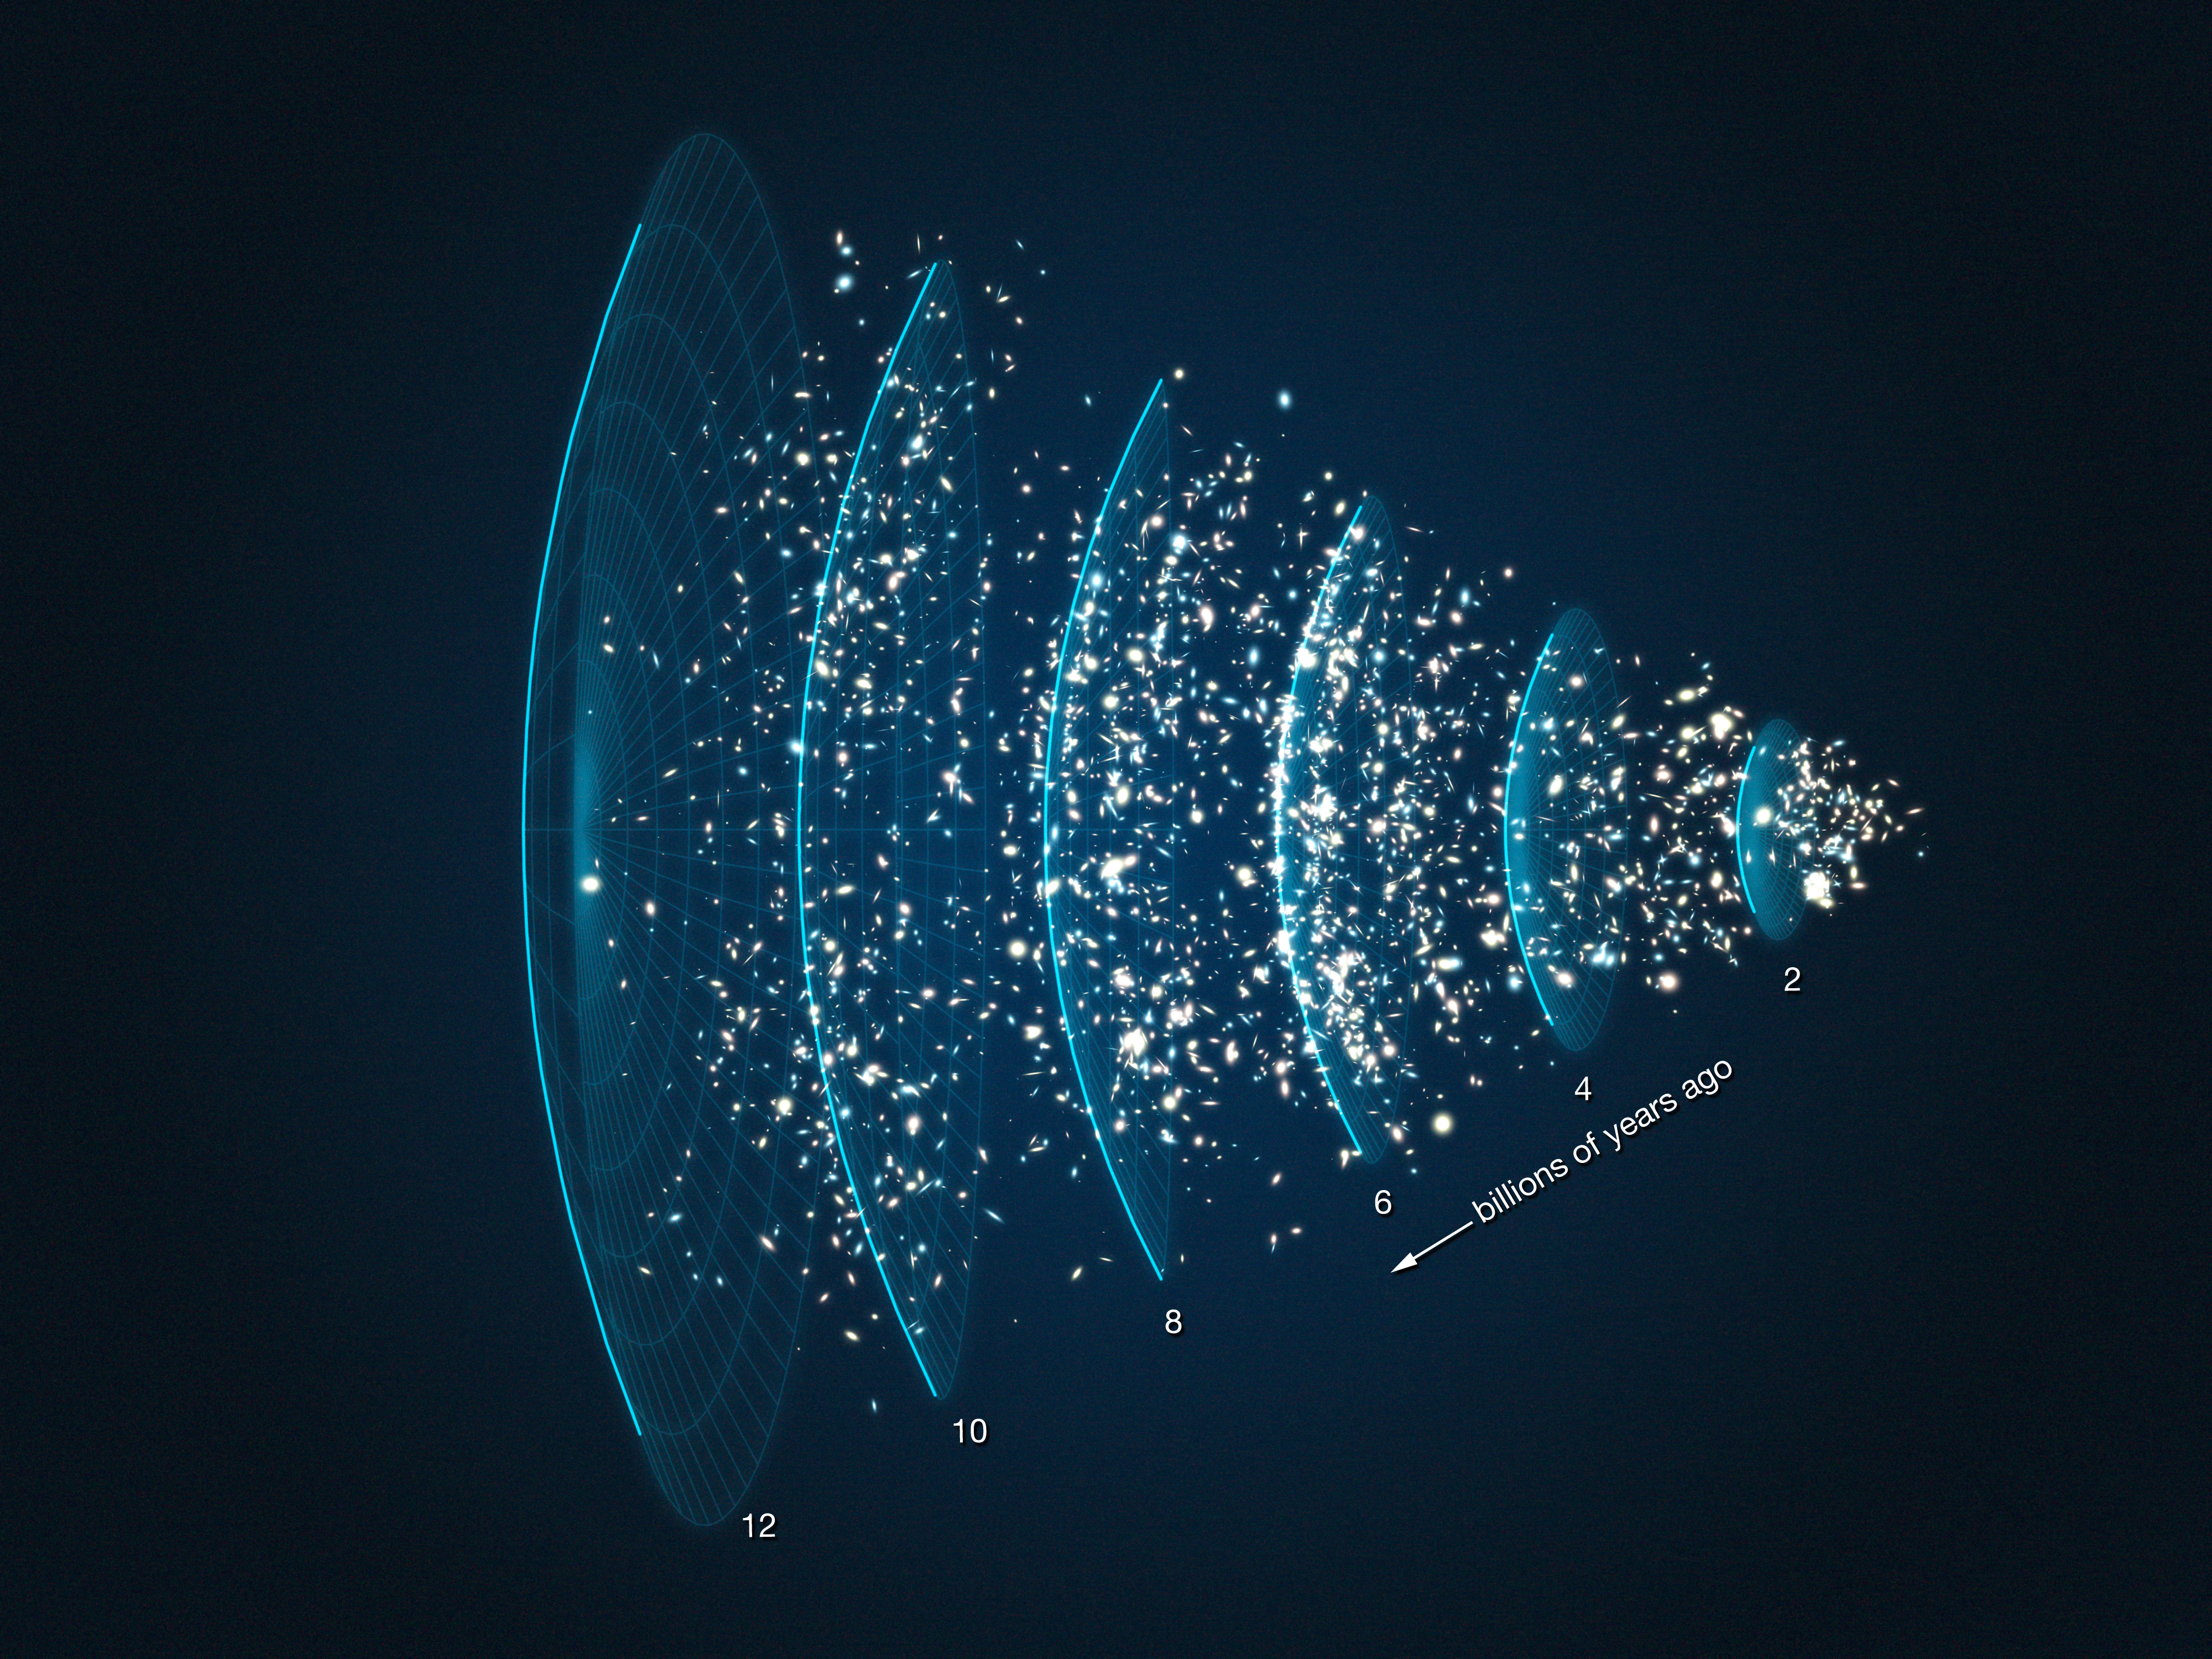

Visualisation of galaxies from the ESO GOODS spectroscopic campaign

The Great Observatories Origins Deep Survey (GOODS) project unites the world’s most advanced observatories, including the NASA/ESA Hubble Space Telescope, to make extremely deep observations of the distant Universe, across the electromagnetic spectrum. GOODS gives us a unique view of the formation and evolution of galaxies across cosmic time, by observing two deep fields in the sky. Astronomers used data from Hubble’s Advanced Camera for Surveys to pinpoint target galaxies for further investigation by other telescopes, including ESO’s Very Large Telescope (VLT). In turn, spectrographs on the VLT captured the spectra of these galaxies, spreading out the colours of their light like a rainbow. This let them measure the redshift of their light, and hence how distant they are. An extensive campaign produced redshifts for almost 3000 galaxies. With this knowledge, we can place the galaxies at distances along a vast cone of space, as shown in this visualisation, stretching out from our own vantage point like a searchlight beam into deep space. We can take an amazing journey through a tunnel towards the edge of the Universe. In some places, the galaxies cluster together, forming structures which are up to tens of millions of light years in scale.

Credit: ESO/L. Calçada/ESO-GOODS team